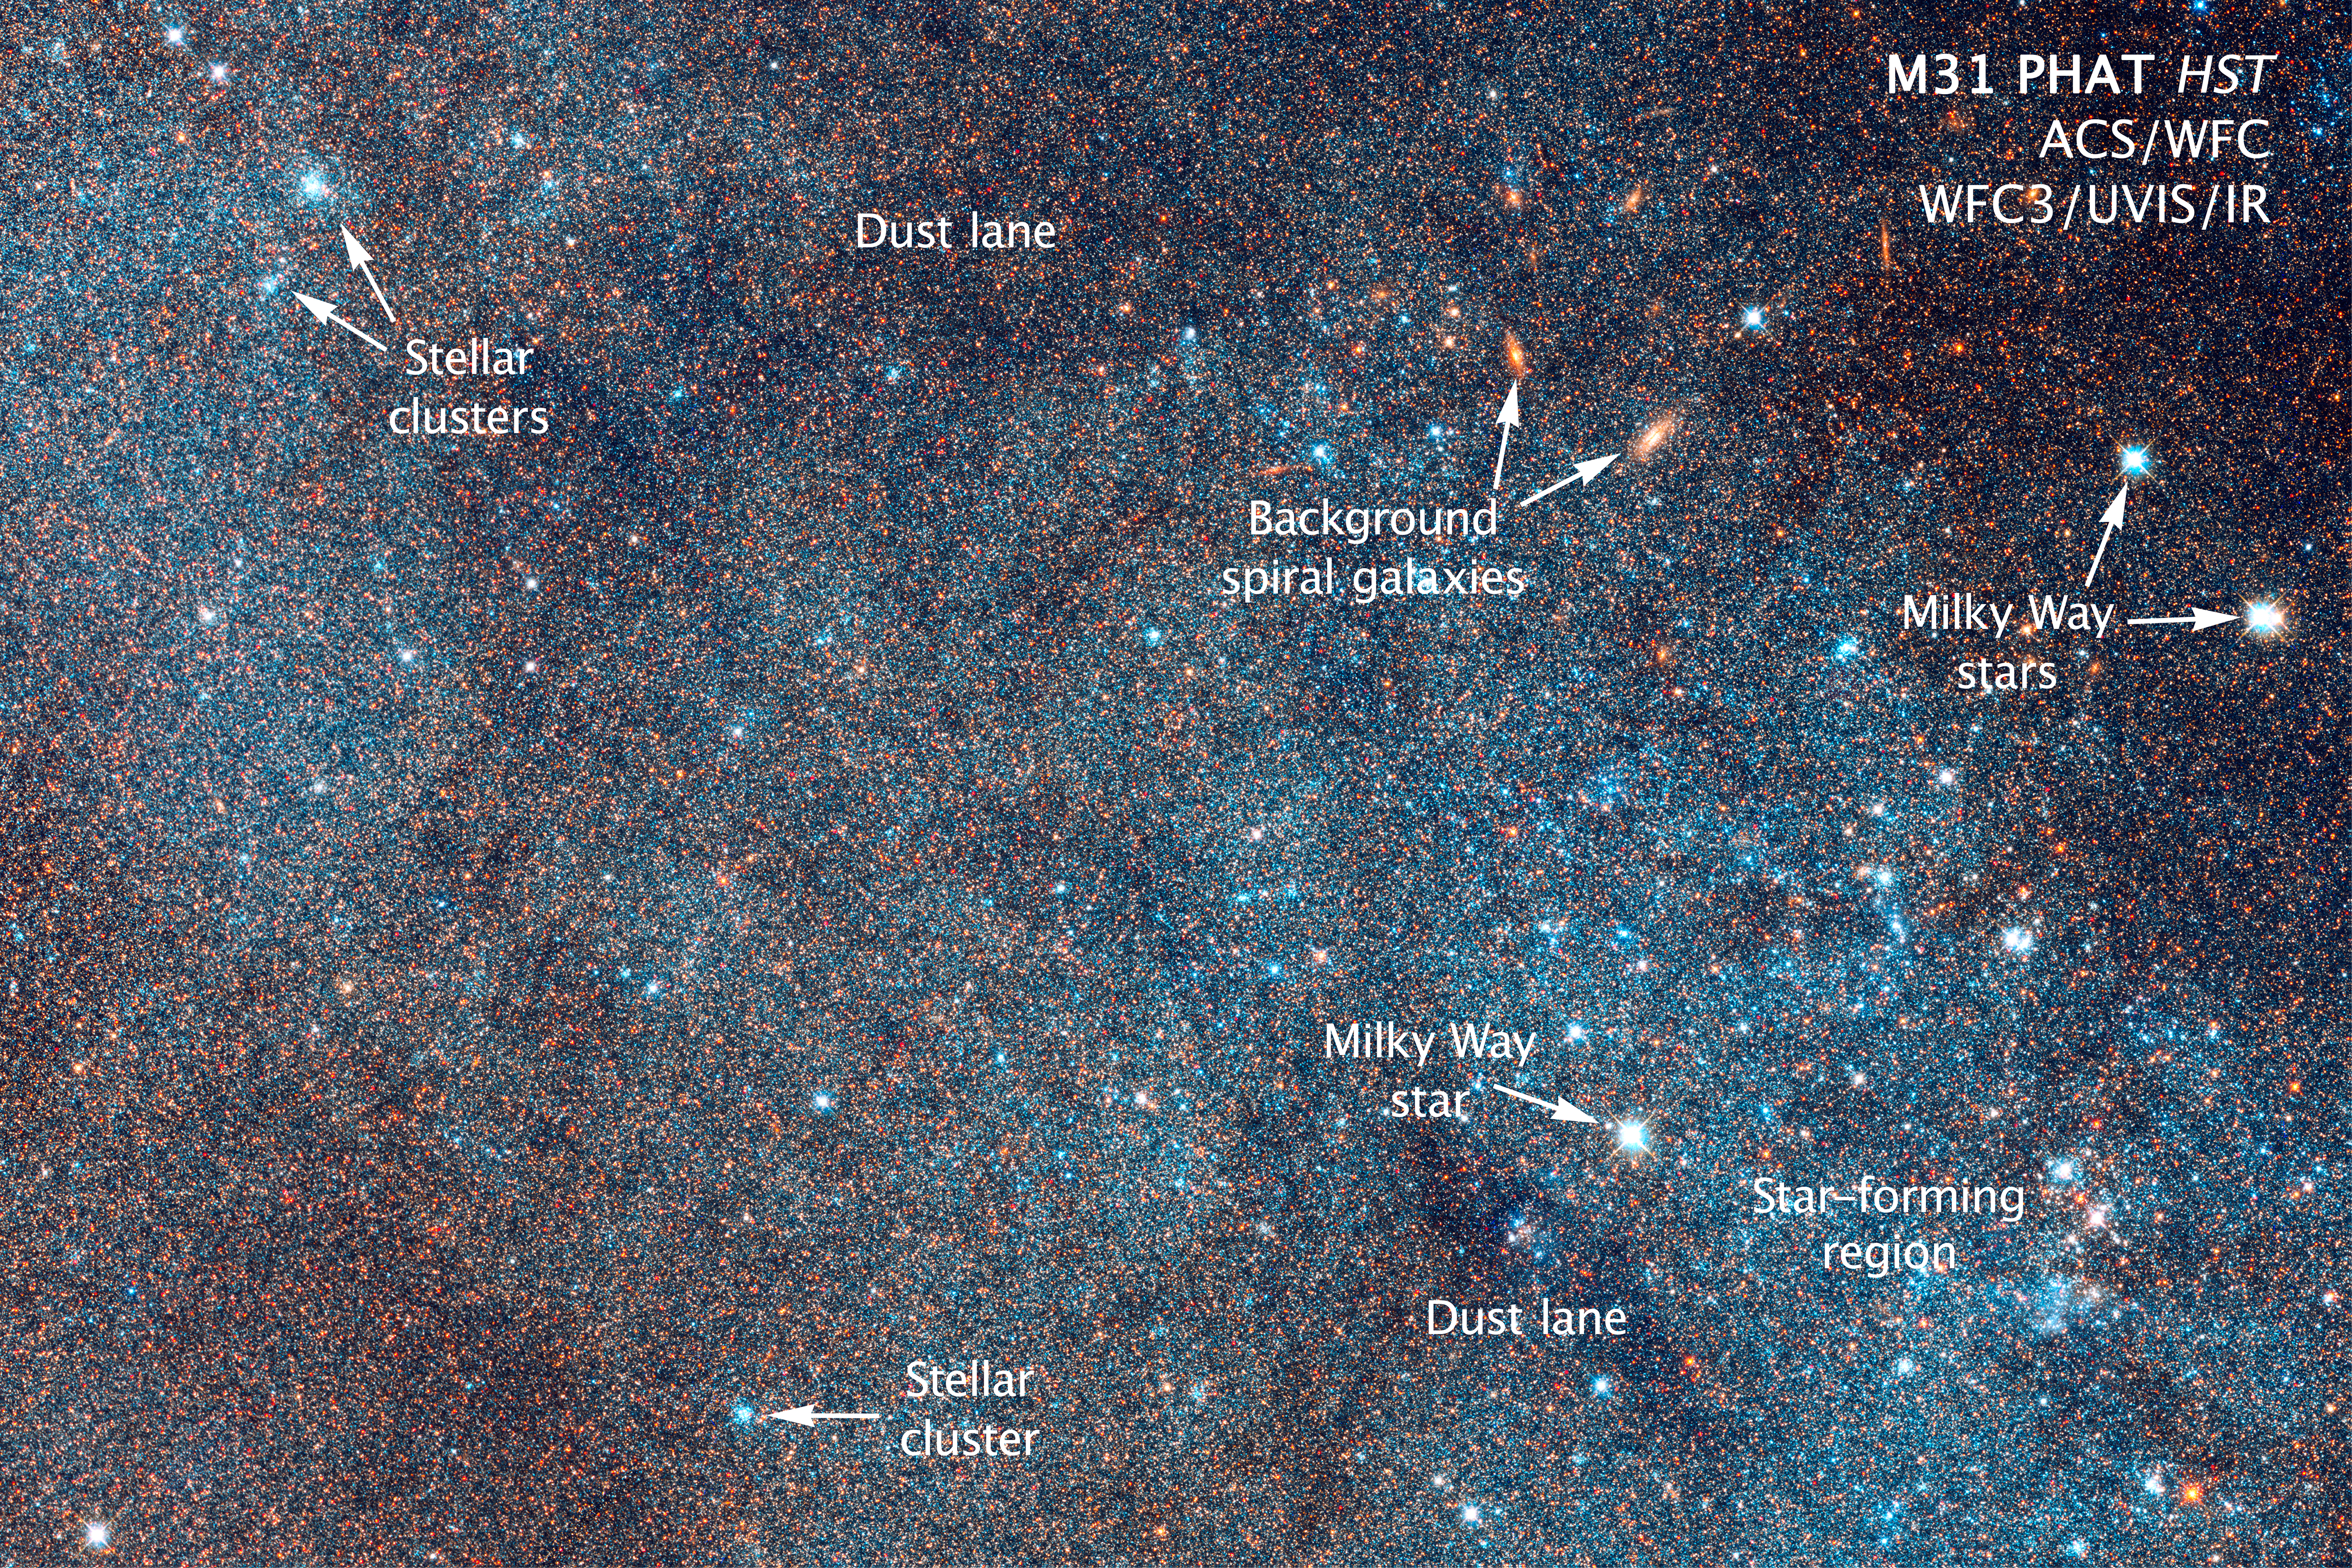

Annotated section of Hubble image of the Andromeda Galaxy

This detailed image from the NASA/ESA Hubble Space Telescope shows a section of the Andromeda Galaxy, Messier 31, and marks a few of the many features that are revealed within it. Several object types are labelled, including dust lanes, stellar clusters, Milky Way stars, and star-forming regions.

Credit: NASA, ESA/Hubble, and Z. Levay (STScI/AURA)
PHAT Brick Credit: NASA, ESA/Hubble, J. Dalcanton (University of Washington), B. F. Williams (University of Washington, USA), L. C. Johnson (University of Washington, USA) and the PHAT team